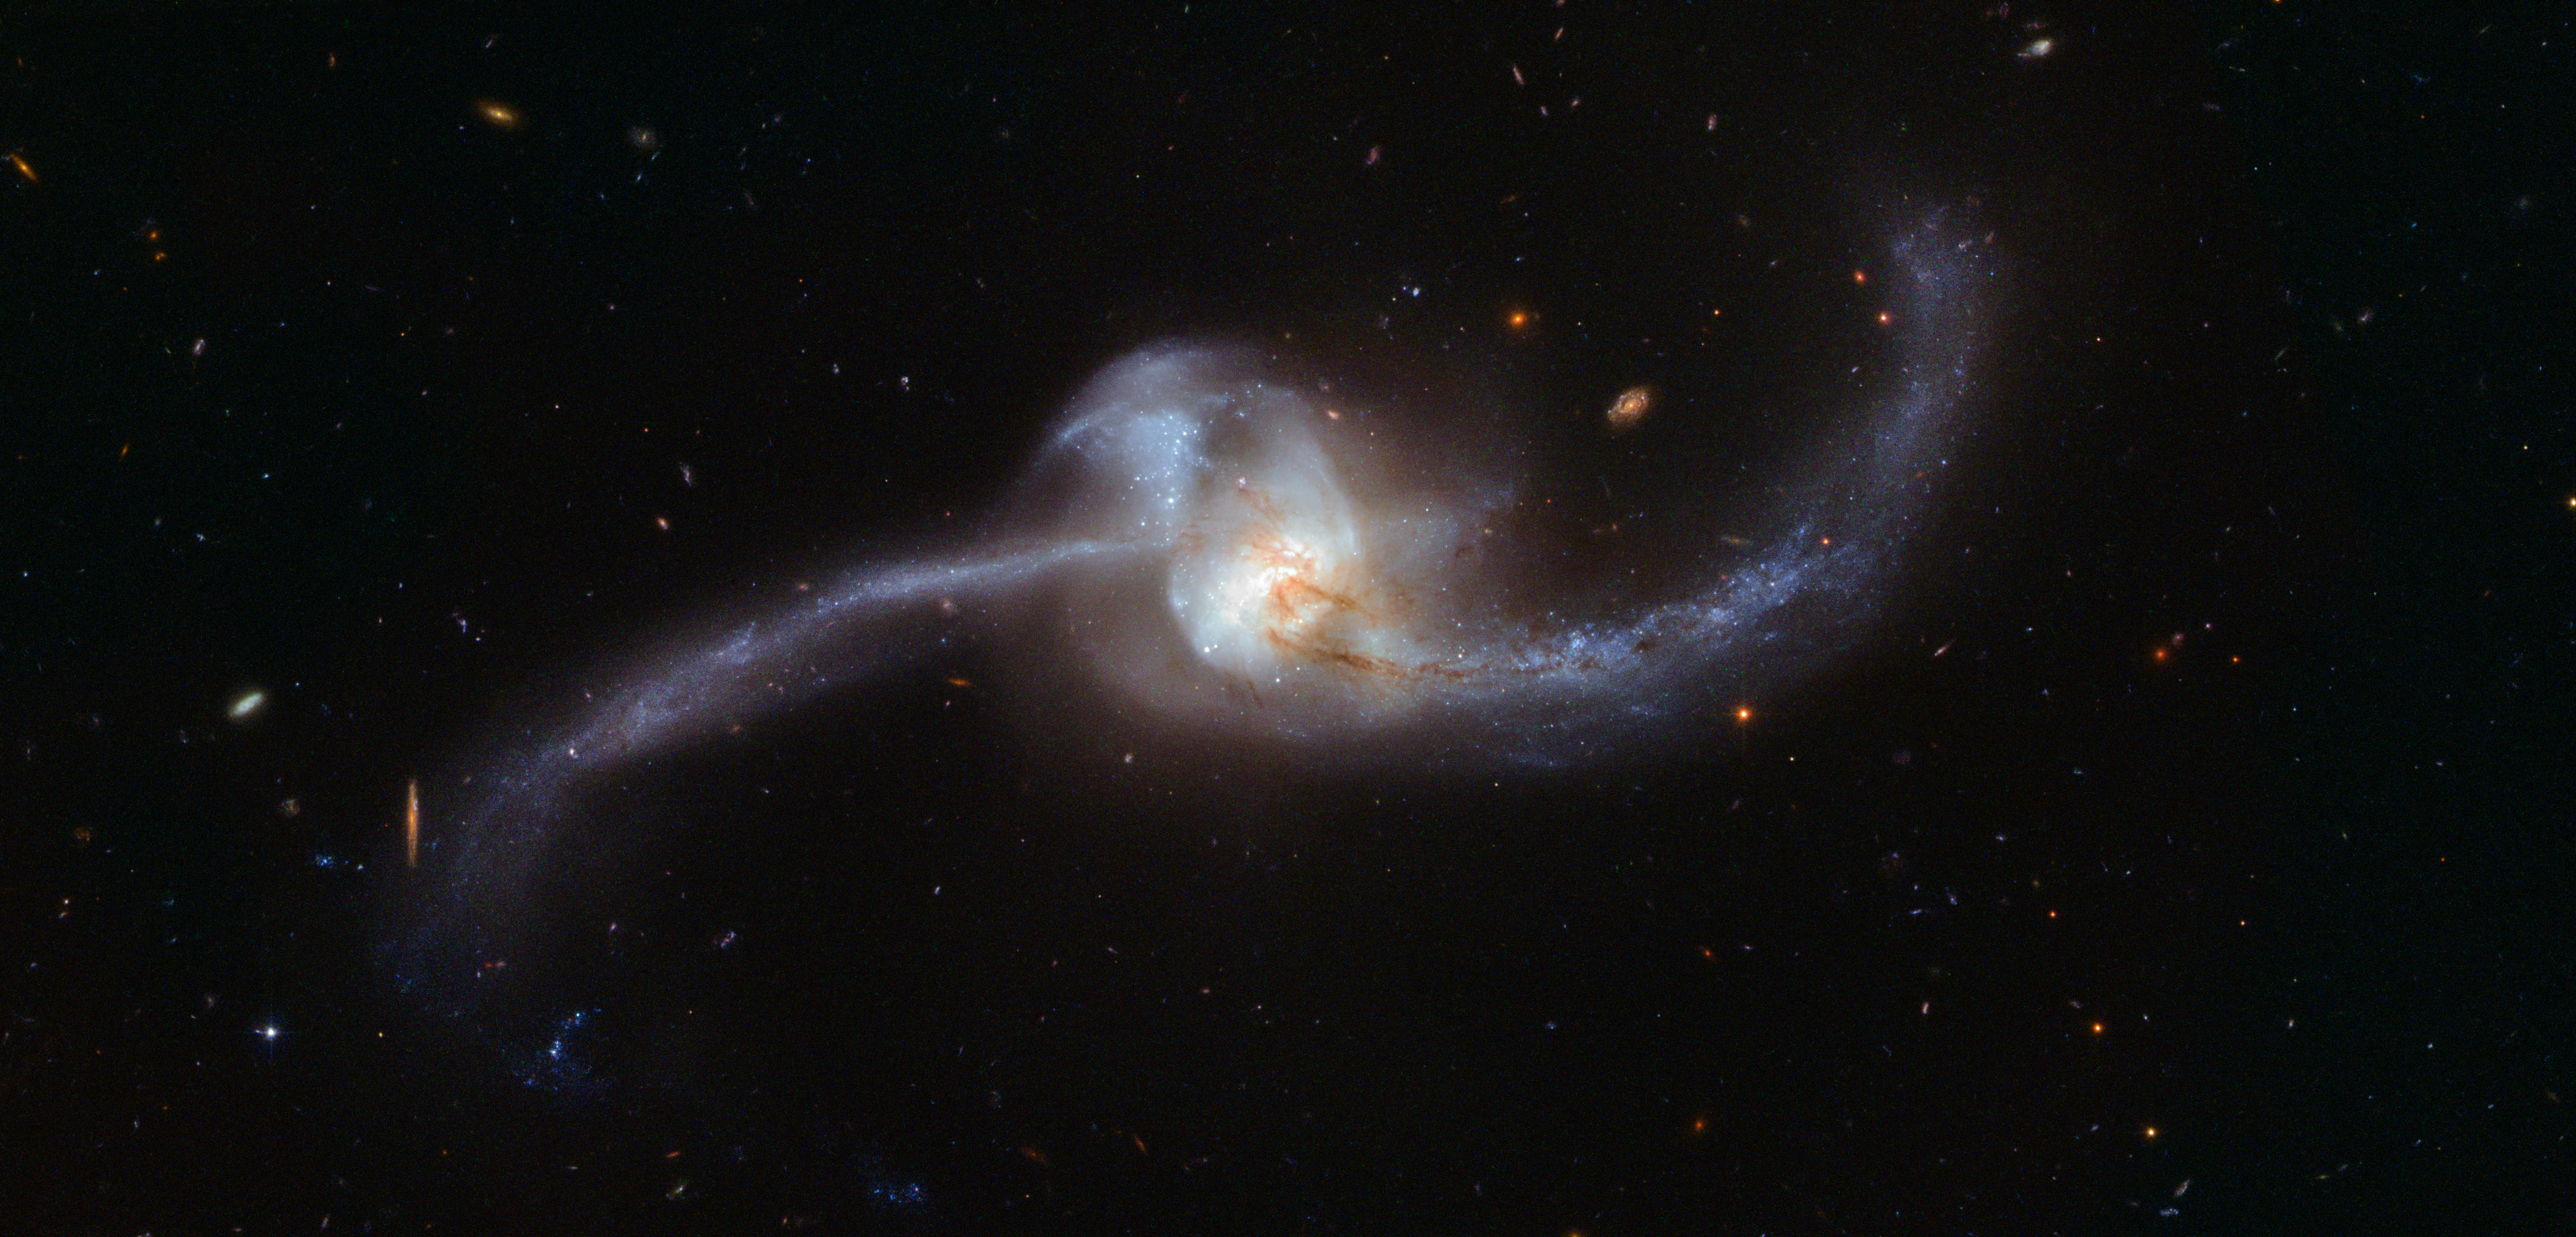

A glimpse of the future

This image, captured by the NASA/ESA Hubble Space Telescope, shows what happens when two galaxies become one. The twisted cosmic knot seen here is NGC 2623 — or Arp 243 — and is located about 250 million light-years away in the constellation of Cancer (The Crab).

NGC 2623 gained its unusual and distinctive shape as the result of a major collision and subsequent merger between two separate galaxies. This violent encounter caused clouds of gas within the two galaxies to become compressed and stirred up, in turn triggering a sharp spike of star formation. This active star formation is marked by speckled patches of bright blue; these can be seen clustered both in the centre and along the trails of dust and gas forming NGC 2623’s sweeping curves (known as tidal tails). These tails extend for roughly 50 000 light-years from end to end. Many young, hot, newborn stars form in bright stellar clusters — at least 170 such clusters are known to exist within NGC 2623.

NGC 2623 is in a late stage of merging. It is thought that the Milky Way will eventually resemble NGC 2623 when it collides with our neighbouring galaxy, the Andromeda Galaxy, in four billion years time.

In contrast to the image of NGC 2623 released in 2009 (heic0912), this new version contains data from recent narrow-band and infrared observations that make more features of the galaxy visible.

Credit: ESA/Hubble & NASA